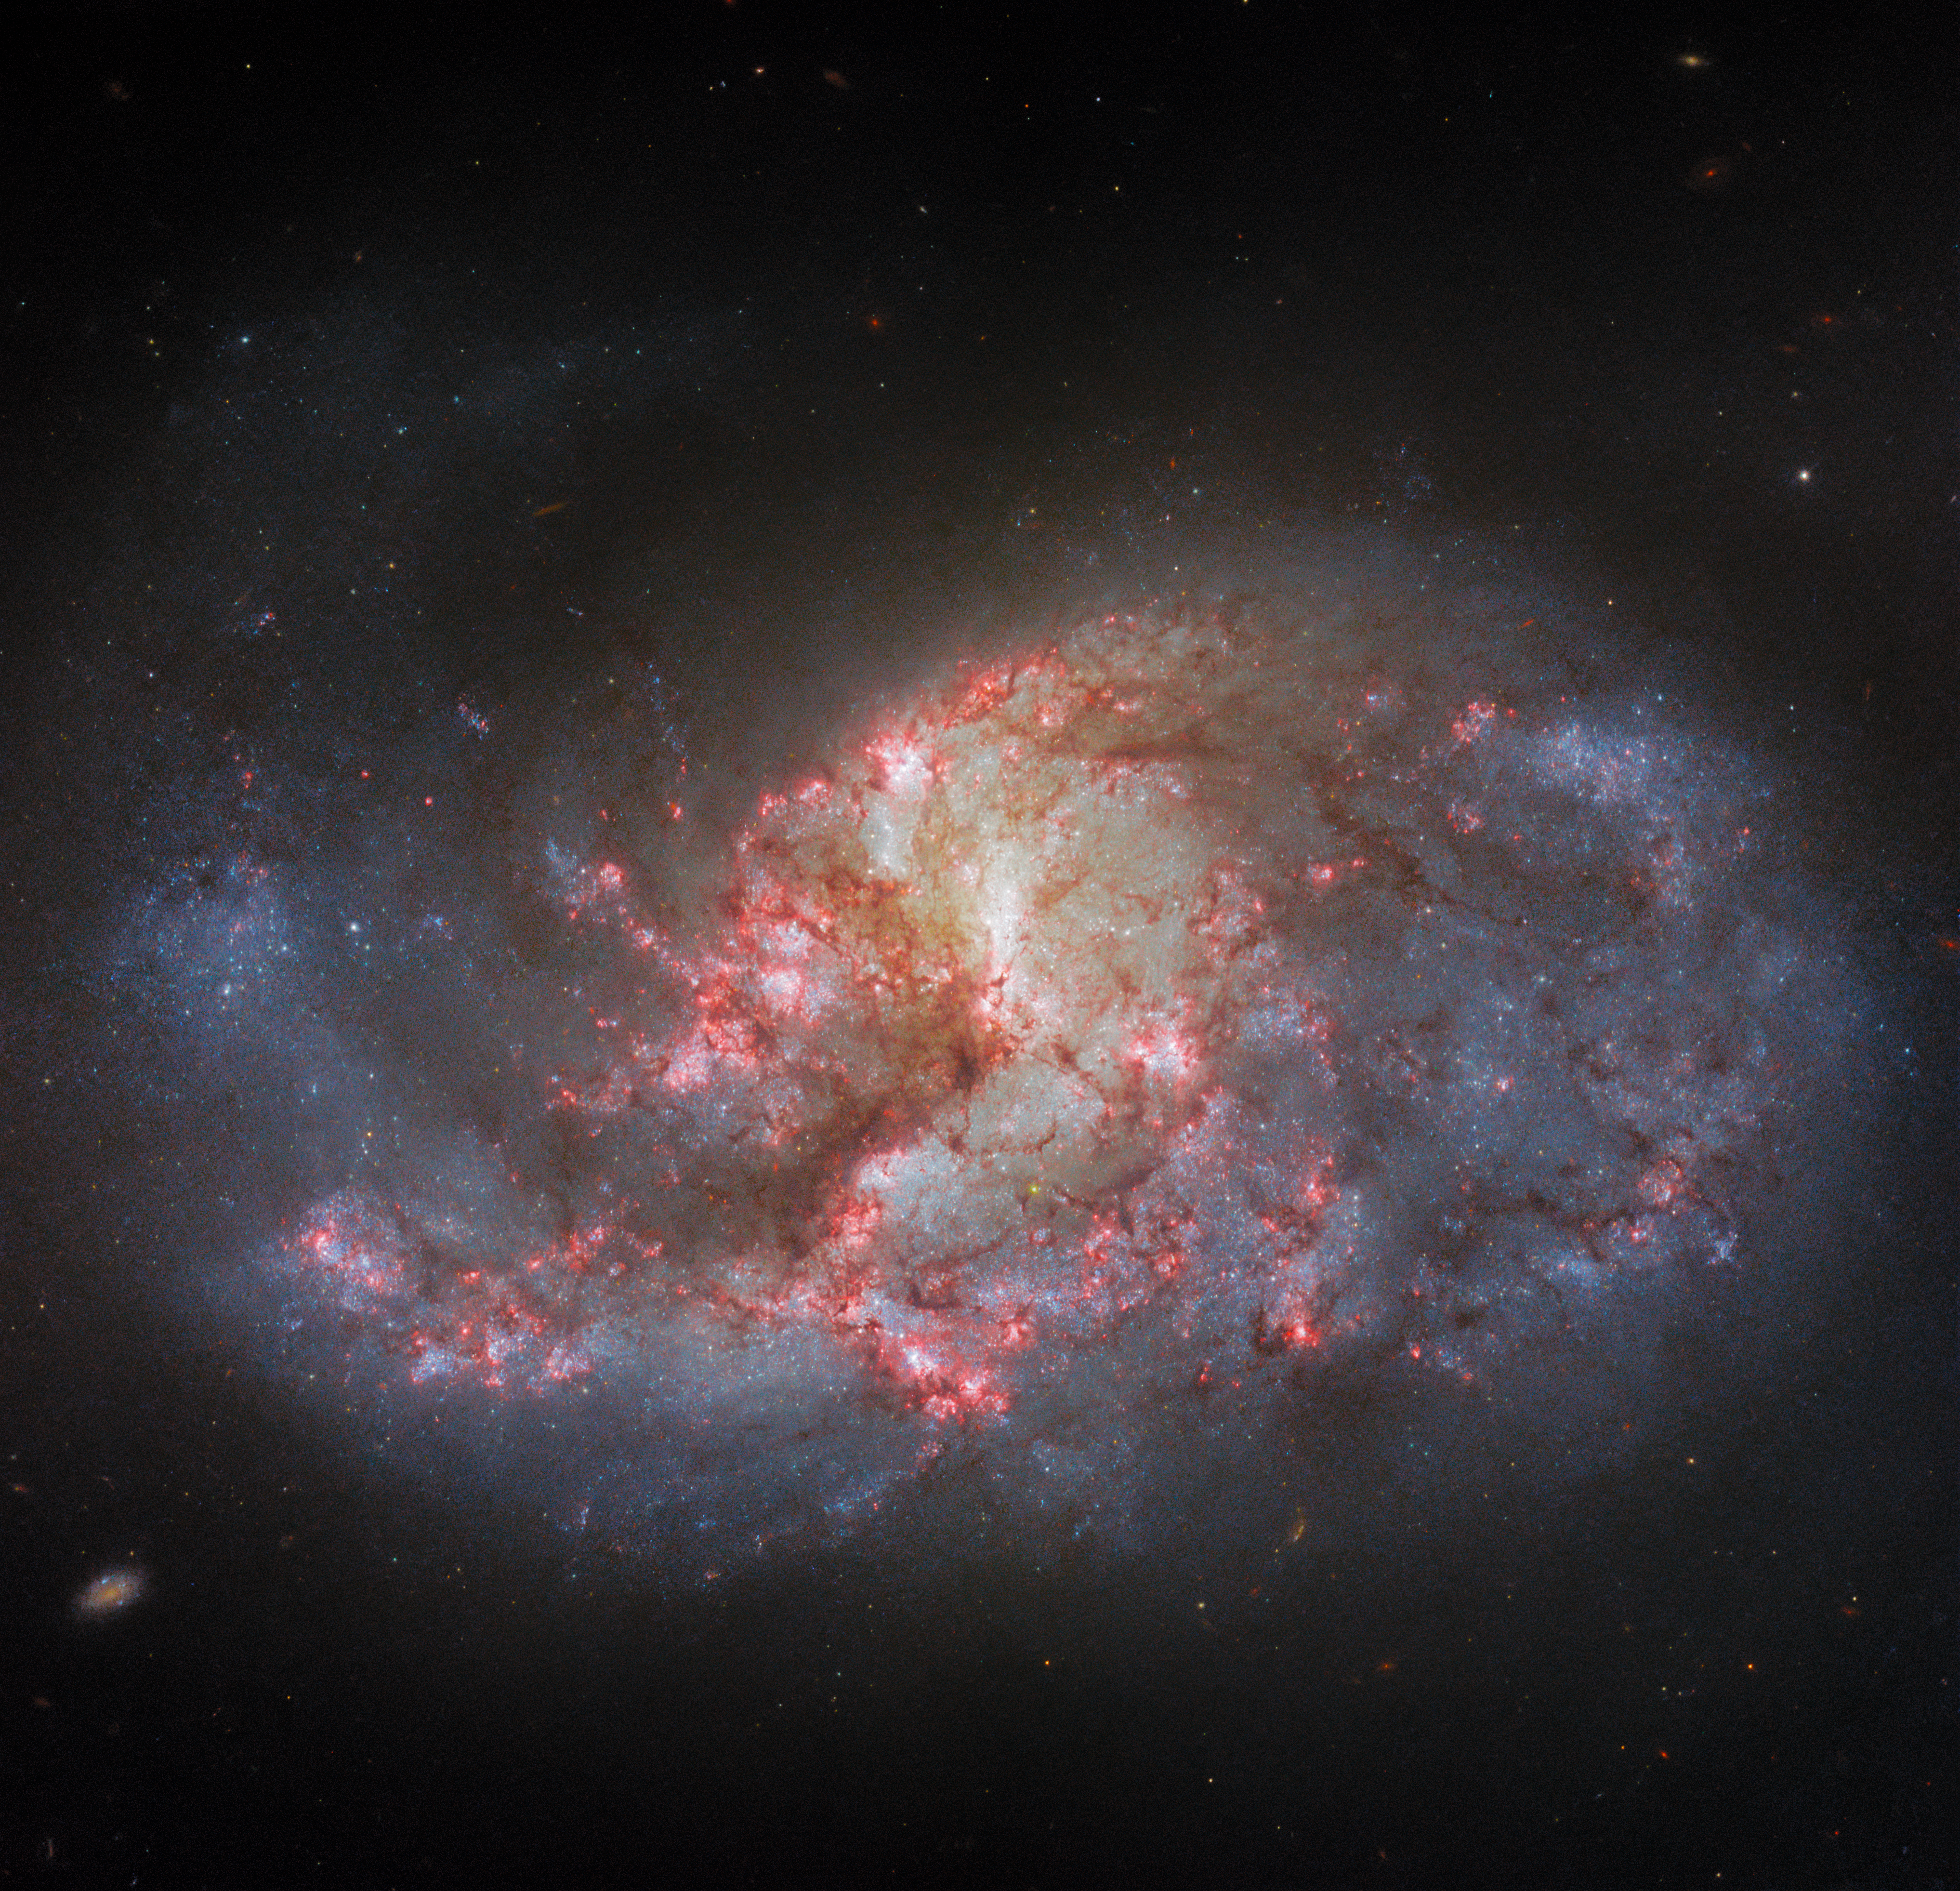

Same galaxy, different filters

This luminous tangle of stars and dust is the barred spiral galaxy NGC 1385, that lies about 30 million light-years from Earth. The same galaxy was the subject of another Hubble Picture of the Week, but the two images are notably different. This more recent image has far more pinkish-red and umber shades, whereas the former image was dominated by cool blues. This chromatic variation is not just a creative choice, but also a technical one, made in order to represent the different number and type of filters used to collect the data that were used to make the respective images.

It is understandable to be a bit confused as to how the same galaxy, imaged twice by the same telescope, could be represented so differently in two different images. The reason is that — like all powerful telescopes used by professional astronomers for scientific research — Hubble is equipped with a range of filters. These highly specialised components have little similarity to filters used on social media: those software-powered filters are added after the image has been taken, and cause information to be lost from the image as certain colours are exaggerated or reduced for aesthetic effect. In contrast, telescope filters are pieces of physical hardware that only allow very specific wavelengths of light to enter the telescope as the data are being collected. This does cause light to be lost, but means that astronomers can probe extremely specific parts of the electromagnetic spectrum. This is very useful for a number of reasons; for example, physical processes within certain elements emit light at very specific wavelengths, and filters can be optimised to these wavelengths.

Take a look at this week's image and the earlier image of NGC 1385. What are the differences? Can you see the extra detail (due to extra filters being used) in this week’s image?

Credit: ESA/Hubble & NASA, R. Chandar, J. Lee and the PHANGS-HST team